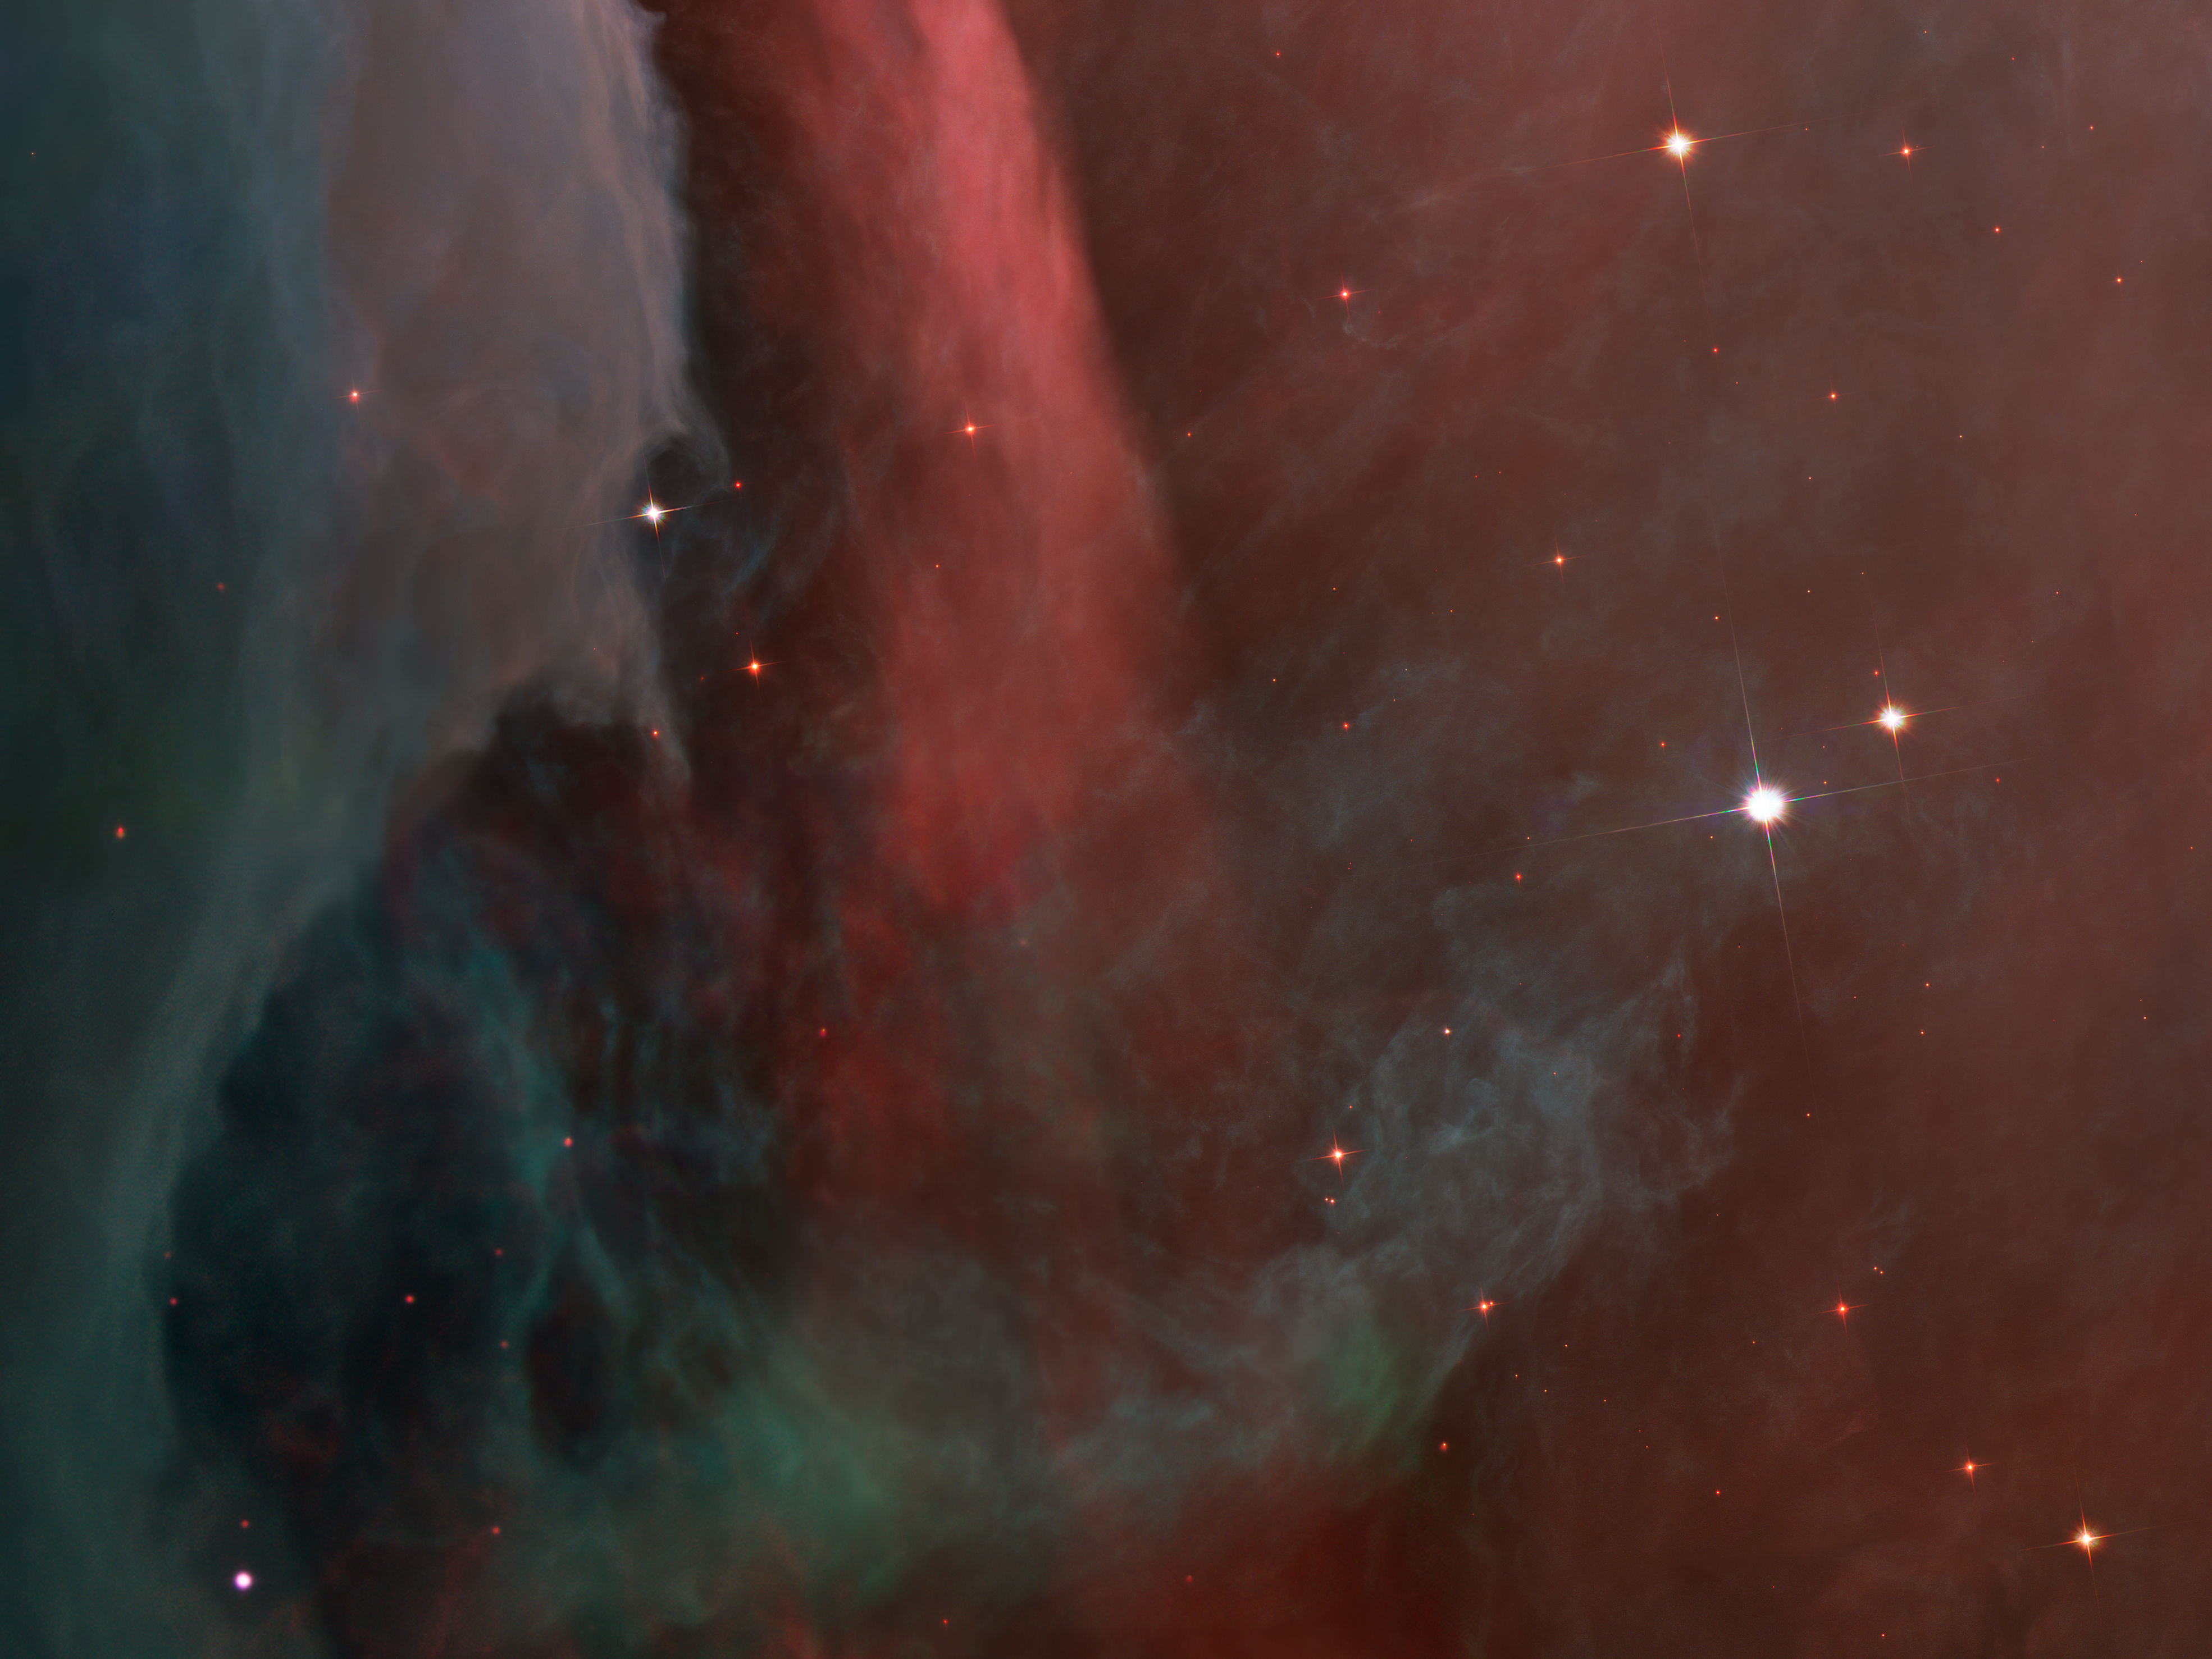

Over the edge

This dark red column shows an illuminated edge of the cavity wall.

Credit: NASA, ESA, M. Robberto ( Space Telescope Science Institute/ESA) and the Hubble Space Telescope Orion Treasury Project Team